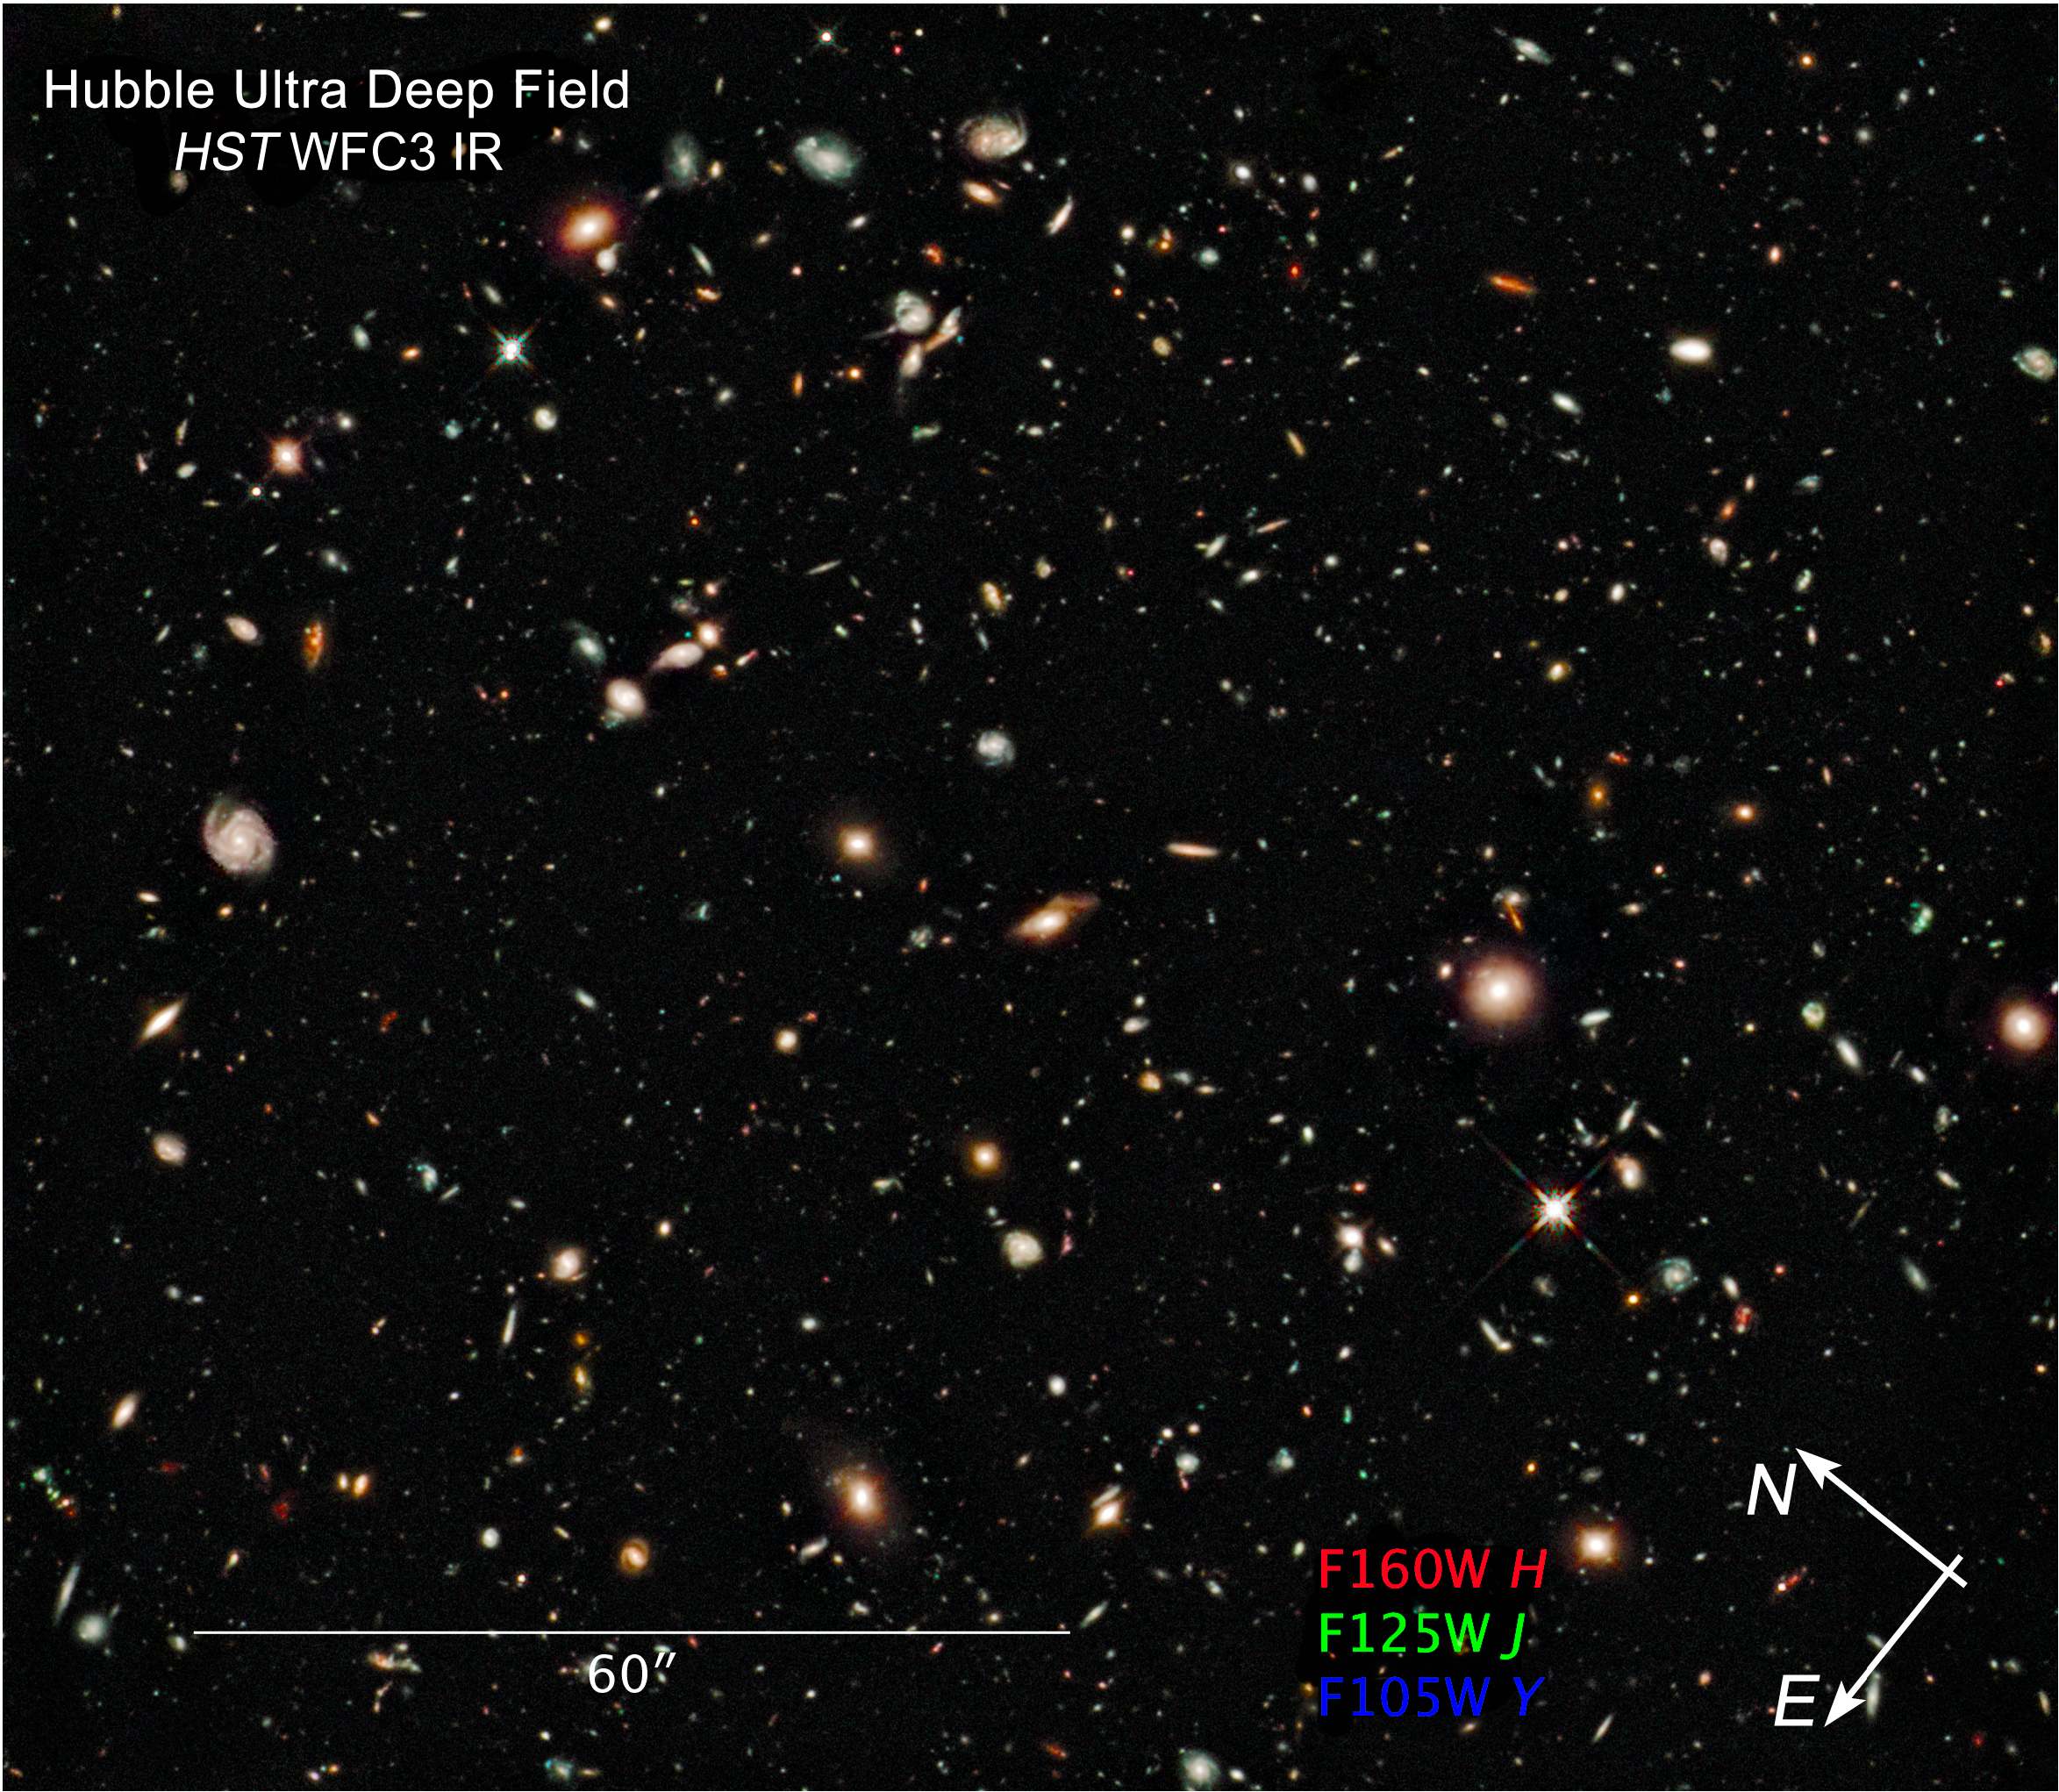

Compass and scale image of Hubble Ultra Deep Field Infrared

Compass and scale image of Hubble Ultra Deep Field Infrared.

Credit: NASA, ESA, Z. Levay (STScI), G. Illingworth (UCO/Lick Observatory and the University of California, Santa Cruz), R. Bouwens (UCO/Lick Observatory and Leiden University) and the HUDF09 Team